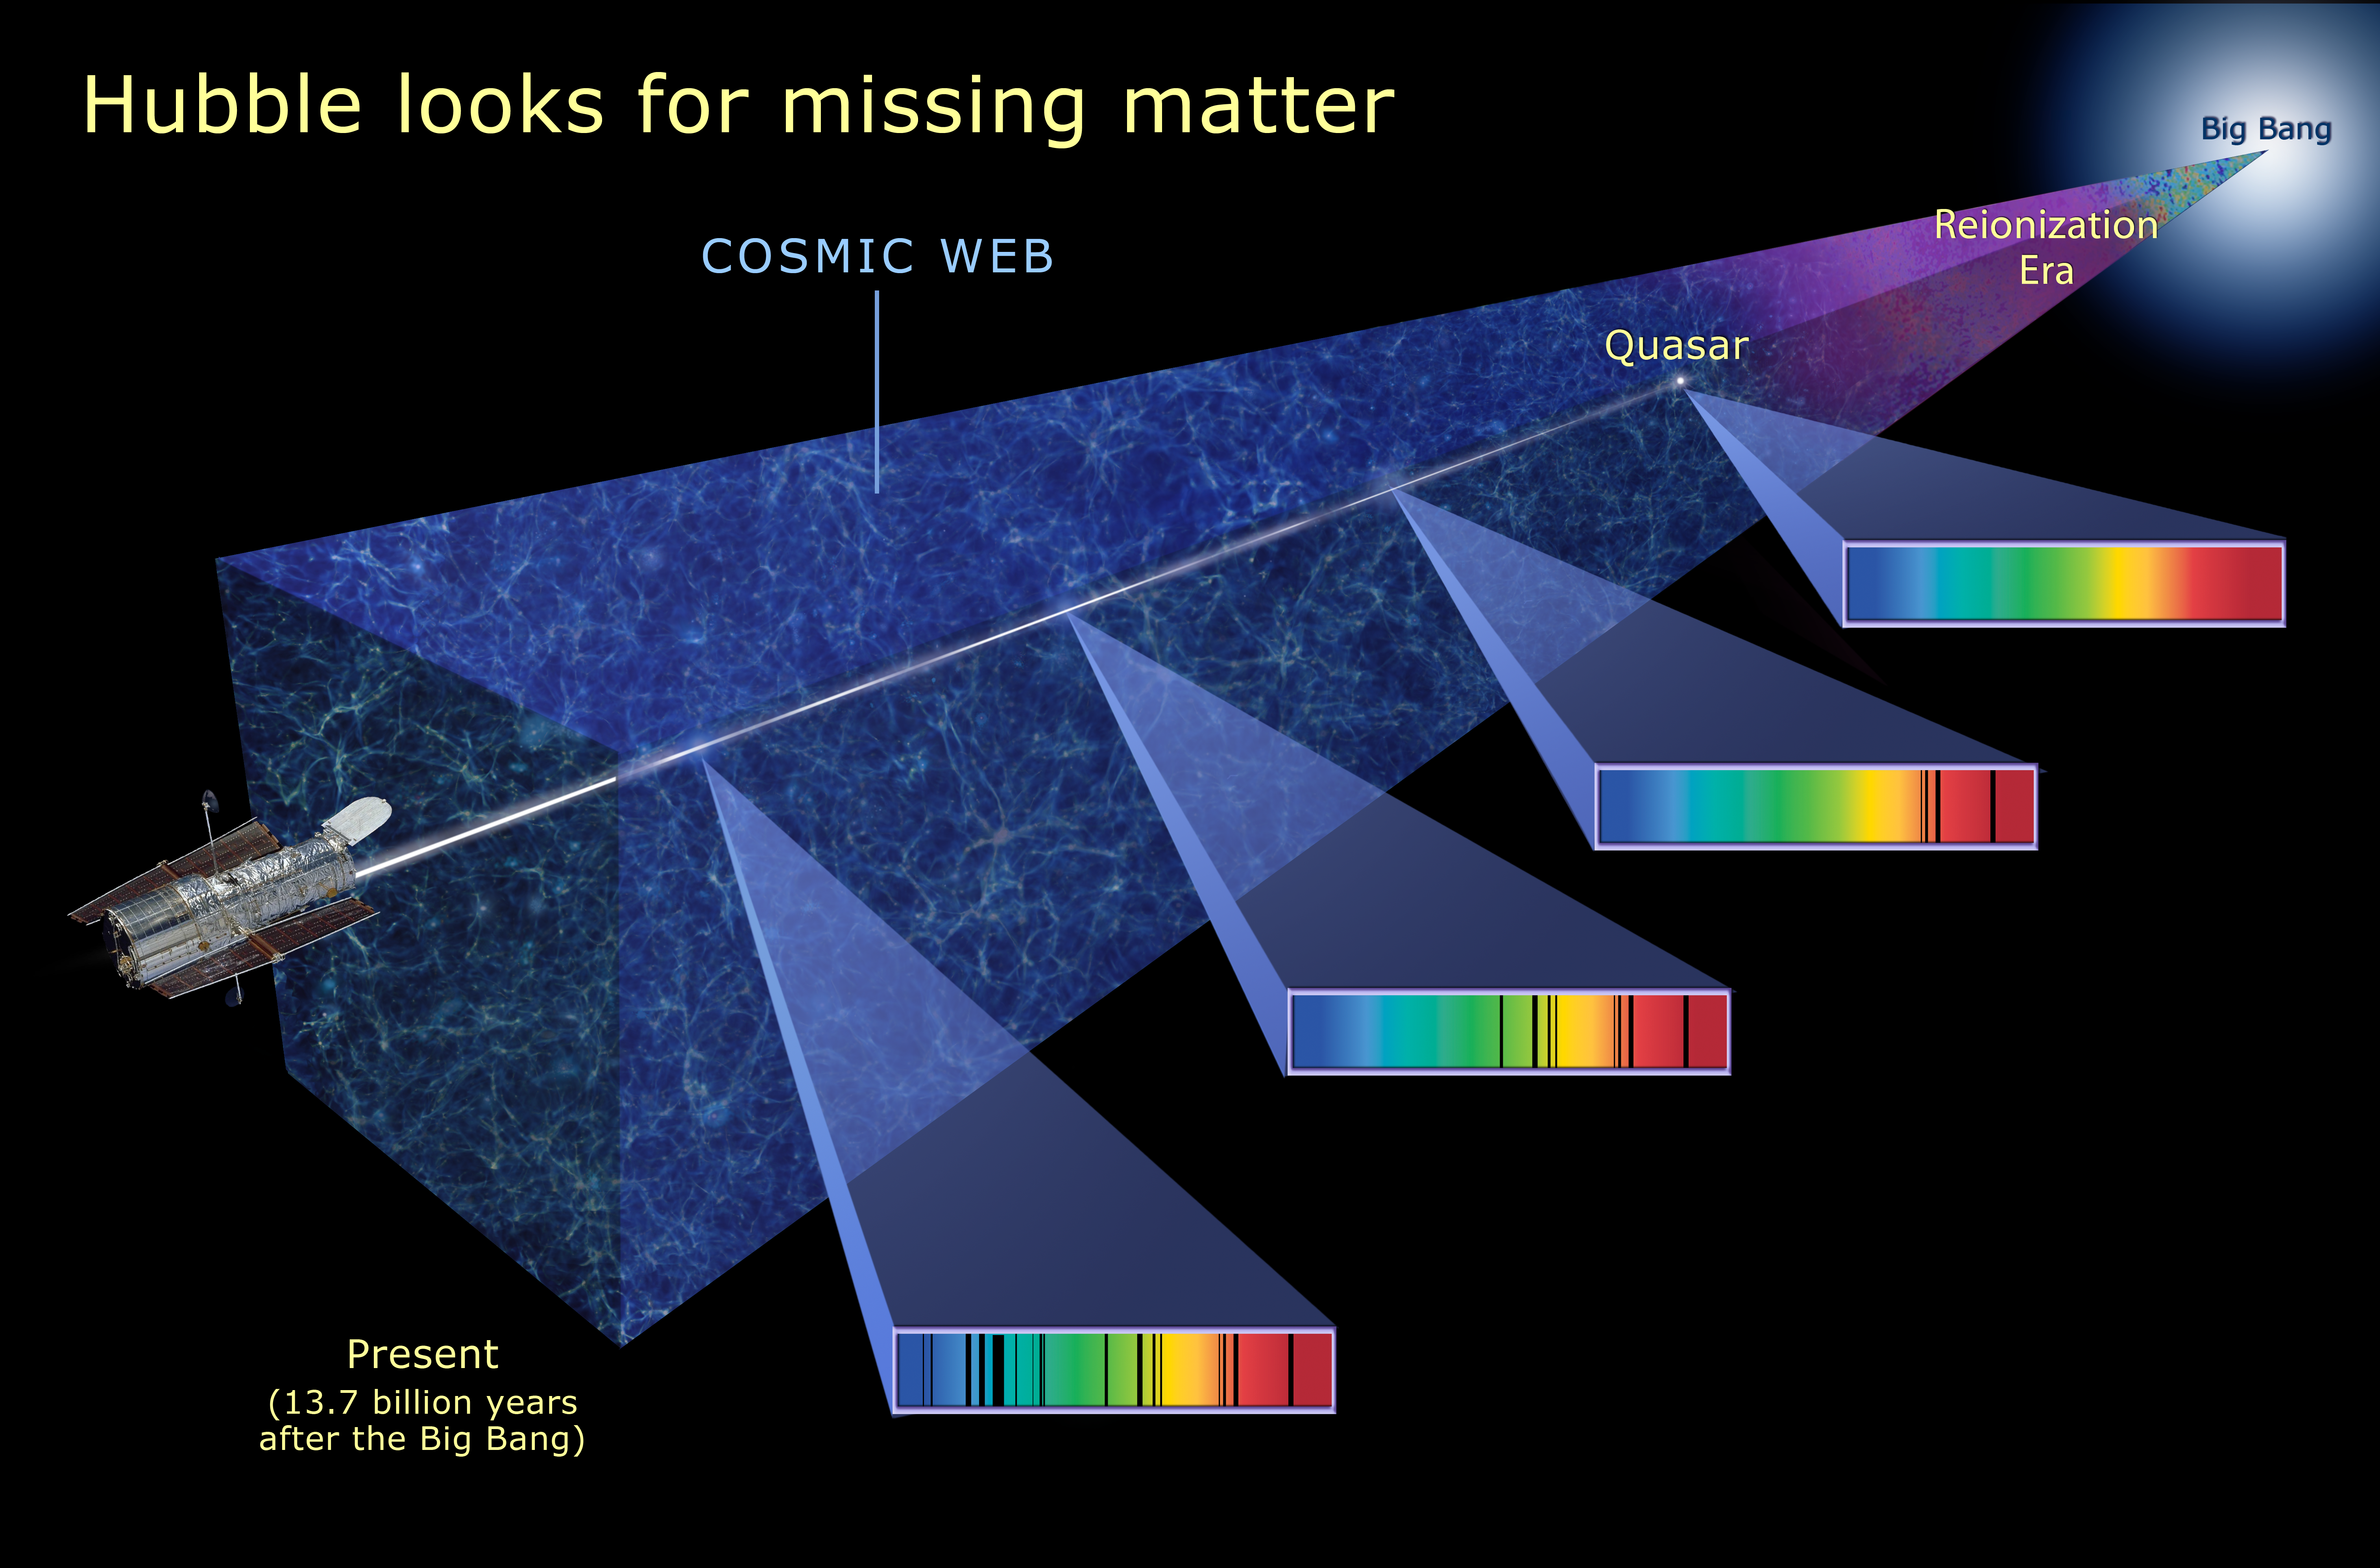

Hubble looks for missing matter

This illustration shows how the Hubble Space Telescope searches for missing ordinary matter, called baryons, by looking at the light from quasars several billion light-years away. Imprinted on that light are the spectral fingerprints of the missing ordinary matter that absorbs the light at specific frequencies (shown in the colorful spectra at right). The missing baryonic matter helps trace out the structure of intergalactic space, called the "cosmic web."

Credit: NASA, ESA, and and A. Feild (STScI)